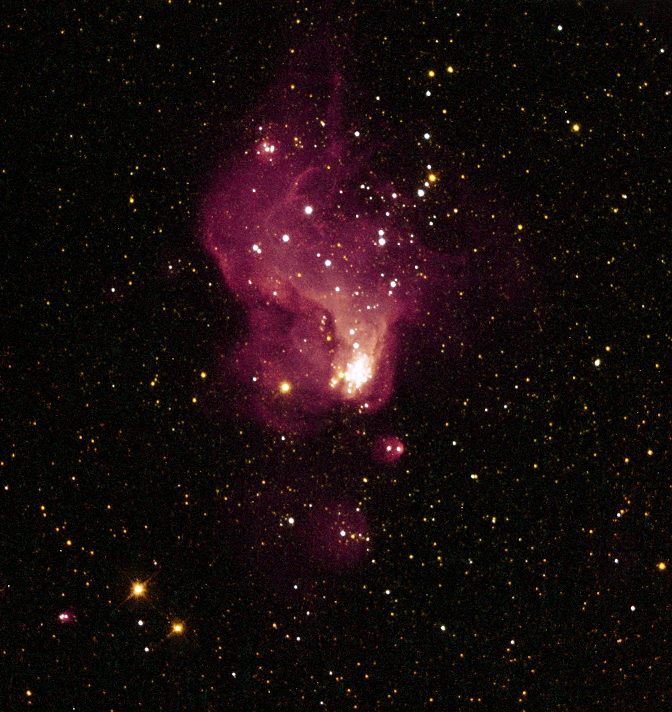

A Giant Star Factory in Neighboring Galaxy NGC 6822

Resembling curling flames from a campfire, this magnificent nebula in a neighboring galaxy is giving astronomers new insight into the fierce birth of stars, which may have been more a typical occurrence in the early universe.

The glowing gas cloud, called Hubble-V, has a diameter of about 200 light-years. A faint tail of gas trailing off the top of this Hubble Space Telescope image sits opposite a dense cluster of bright stars at the bottom of the irregularly shaped nebula.

Credit: NASA, ESA, and The Hubble Heritage Team (STScI/AURA)